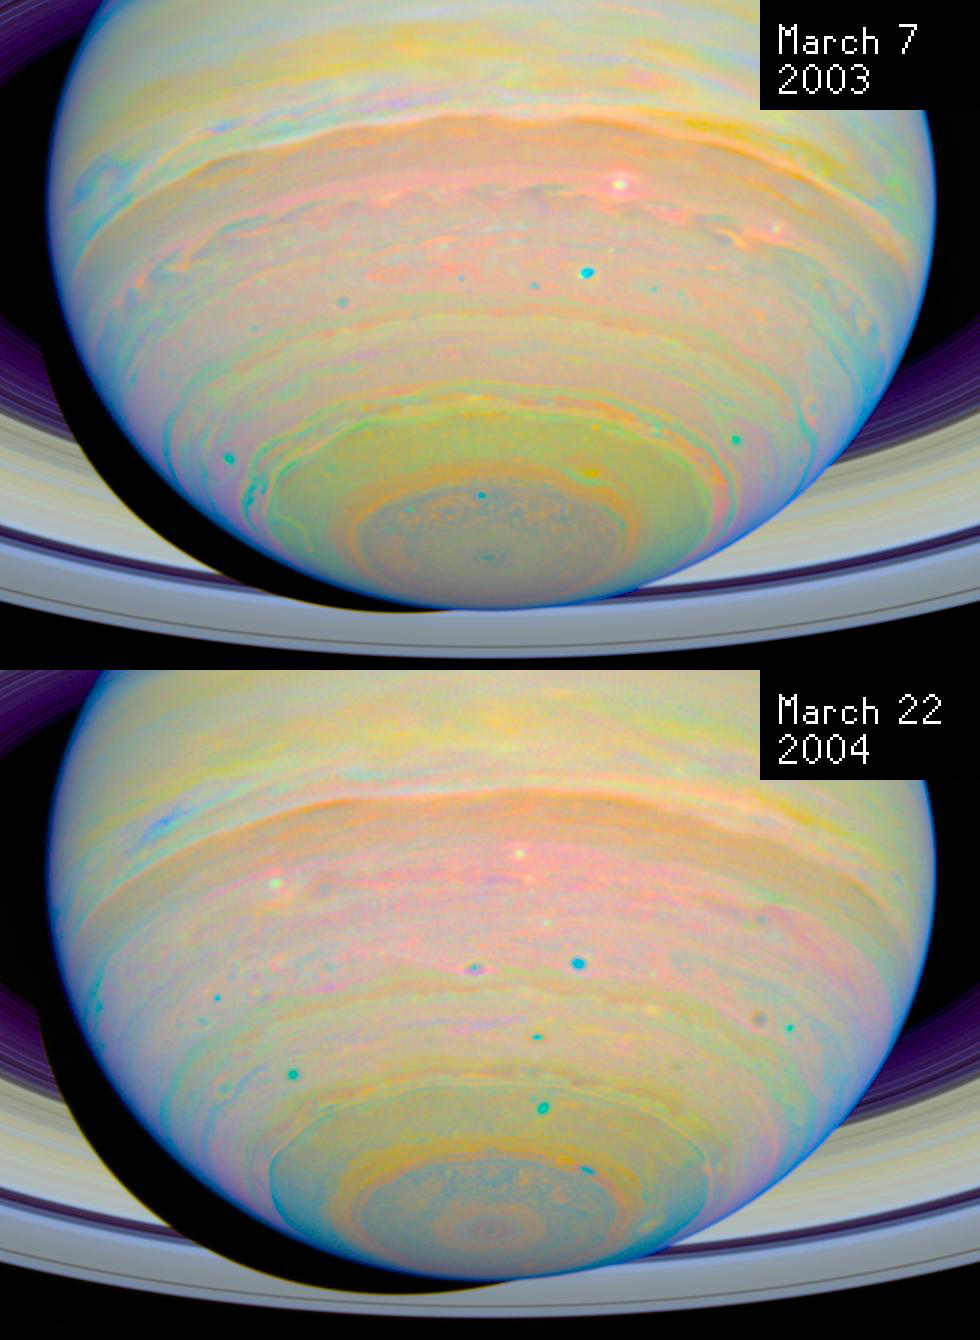

Saturn: 2003/2004 Image Comparison

Comparison of two images of Saturn taken by the Hubble Space Telescope in 2003 and 2004, respectively.

Credit: NASA, ESA and E. Karkoschka (University of Arizona)